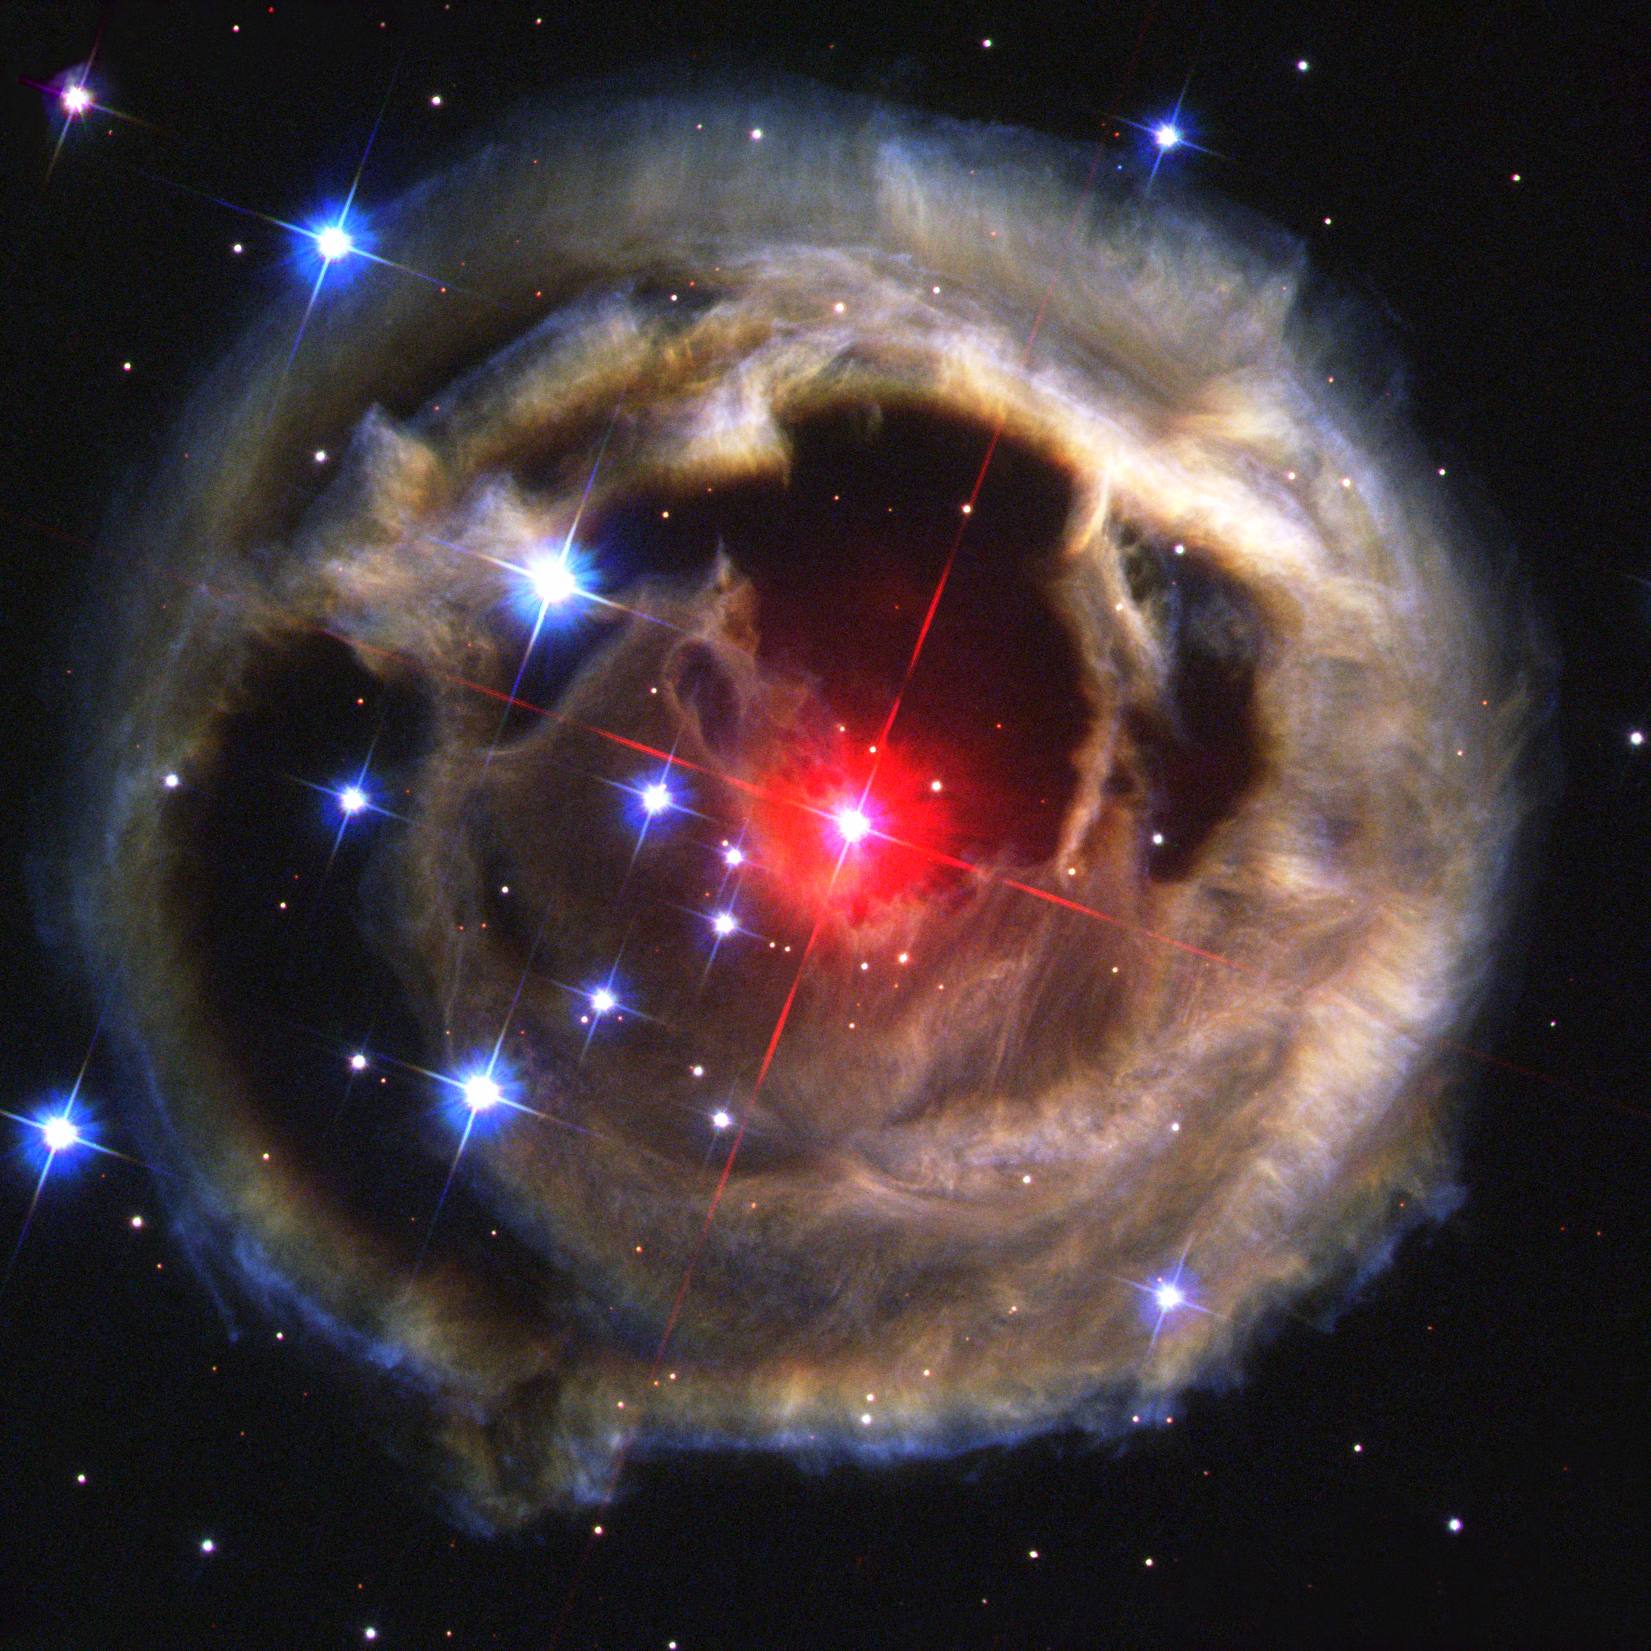

Hubble watches light echo from mysterious erupting star (December 2002 image)

This is the first in a sequence of four pictures from the NASA/ESA Hubble Space Telescope's Advanced Camera for Surveys that dramatically demonstrates the echoing of light through space caused by an unusual stellar outburst in January 2002.

The image was taken 17 December 2002. The image is combined from exposures taken through blue (B), green (V), and infrared (I) filters.

Credit: NASA, European Space Agency, and H.E. Bond (STScI)